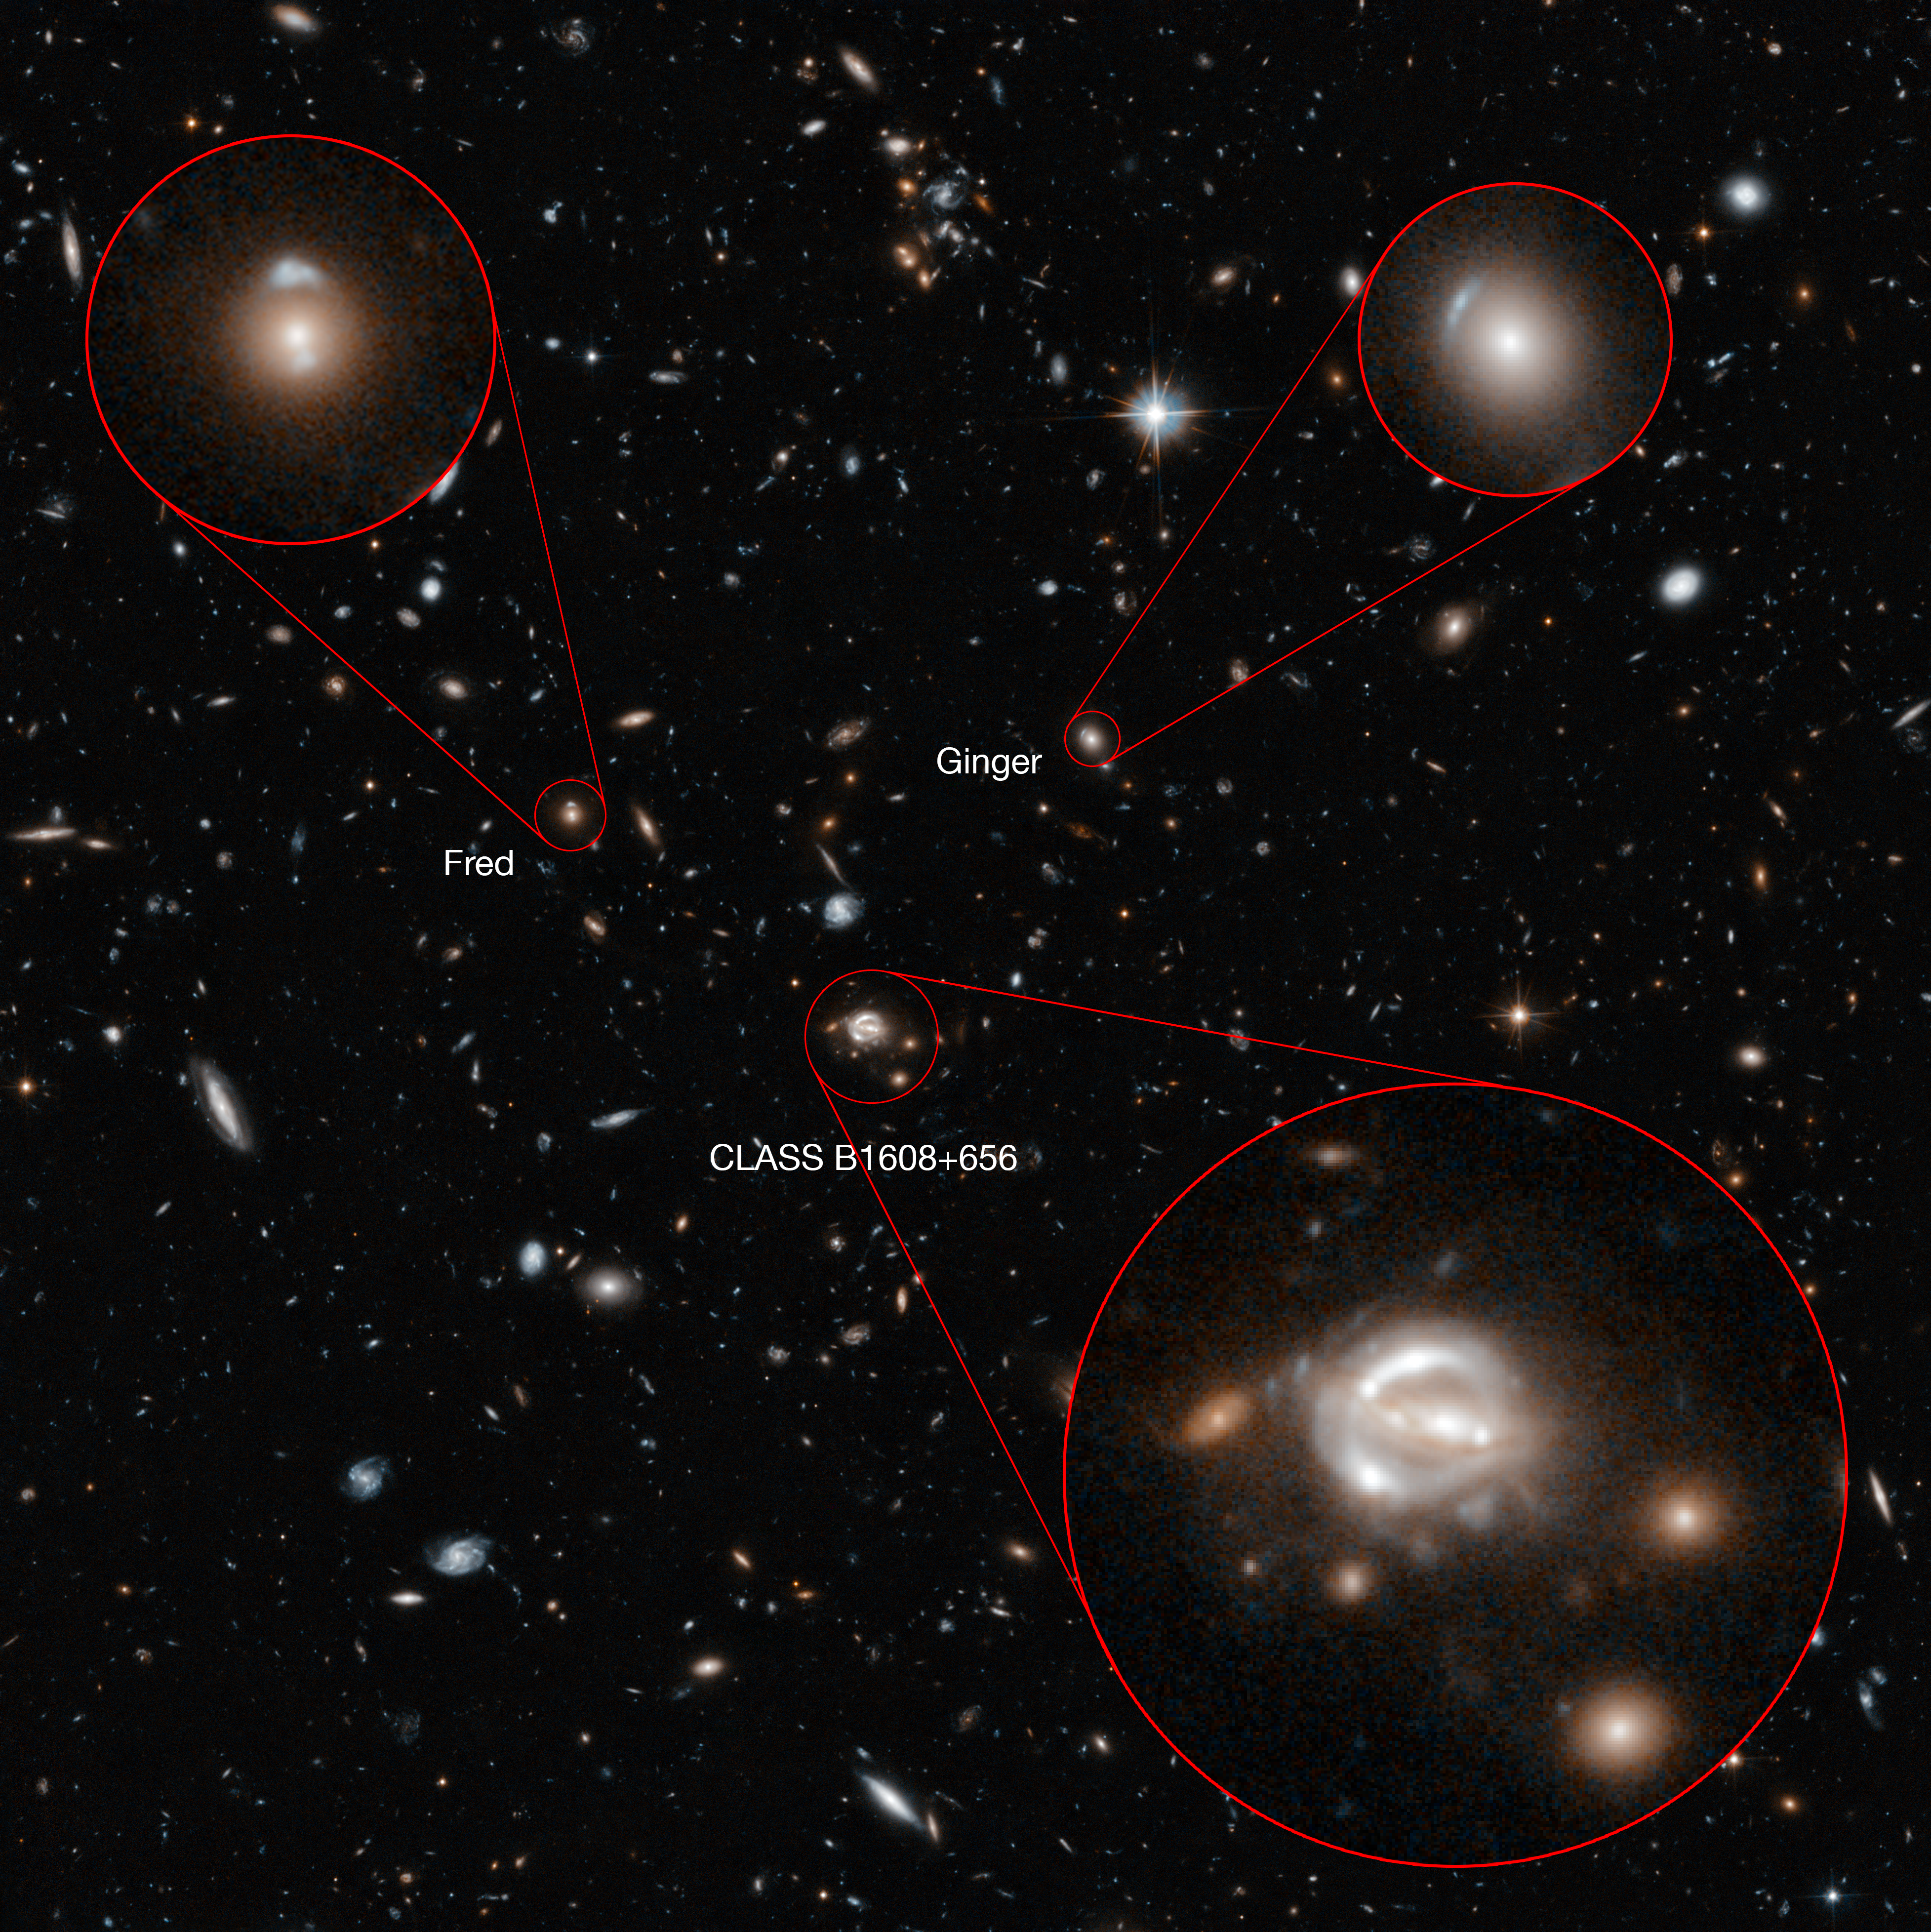

Annotated image of the field around CLASS B1608+656

Most of the galaxies visible in this Hubble image are members of a huge cluster called CLASS B1608+656, which lies about five billion light-years away. But the field also contains other objects that are both significantly closer and far more distant — including two gravitational lenses dubbed Fred and Ginger.

These contain enough mass to visibly distort the light from objects behind them. Fred, also known more prosaically as [FMK2006] ACS J160919+6532, lies near the lens galaxies in CLASS B1608+656, while Ginger ([FMK2006] ACS J160910+6532) is markedly closer to us. Despite their different distances from us, both can be seen near to CLASS B1608+656 in the central region of this Hubble image, and are labelled.

Credit: NASA, ESA